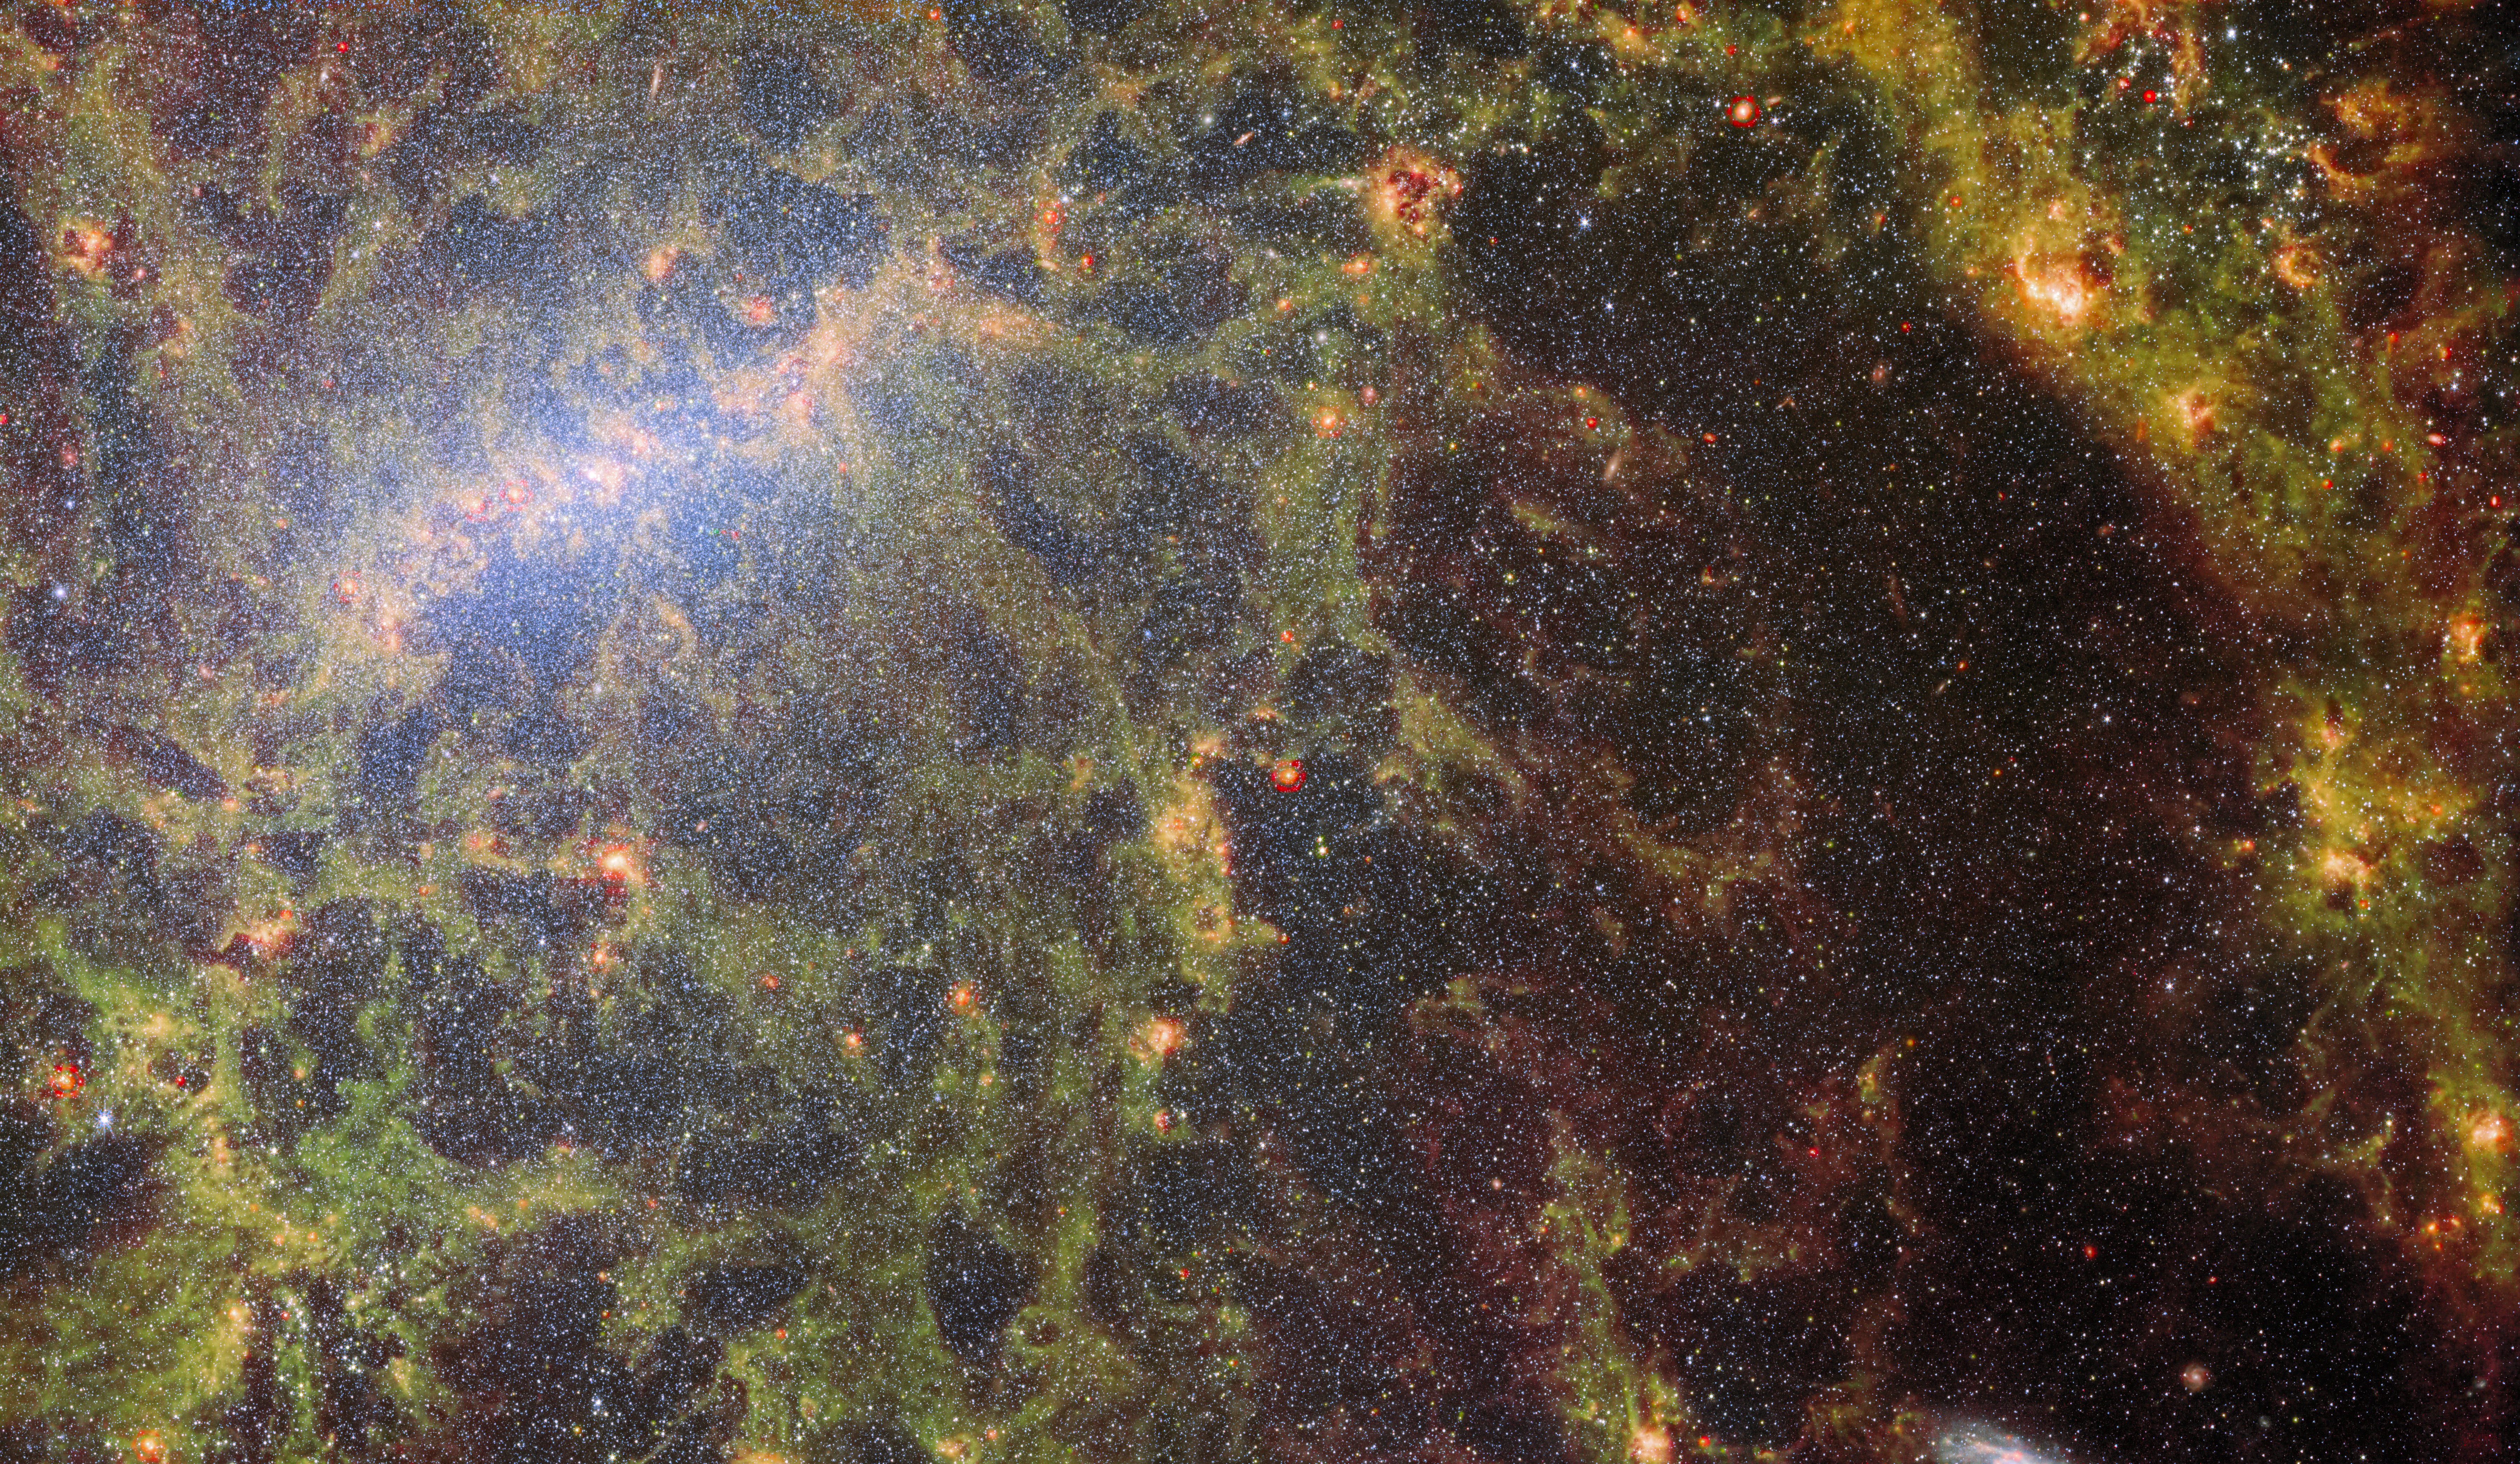

Webb peers behind bars

A delicate tracery of dust and bright star clusters threads across this image from the NASA/ESA/CSA James Webb Space Telescope. The bright tendrils of gas and stars belong to the barred spiral galaxy NGC 5068, whose bright central bar is visible in the upper left of this image. NGC 5068 lies around 17 million light-years from Earth in the constellation Virgo.

This portrait of NGC 5068 is part of a campaign to create an astronomical treasure trove, a repository of observations of star formation in nearby galaxies. Previous gems from this collection can be seen here and here. These observations are particularly valuable to astronomers for two reasons. The first is because star formation underpins so many fields in astronomy, from the physics of the tenuous plasma that lies between stars to the evolution of entire galaxies. By observing the formation of stars in nearby galaxies, astronomers hope to kick-start major scientific advances with some of the first available data from Webb.

The second reason is that Webb’s observations build on other studies using telescopes including the NASA/ESA Hubble Space Telescope and some of the world’s most capable ground-based observatories. Webb collected images of 19 nearby star-forming galaxies which astronomers could then combine with catalogues from Hubble of 10 000 star clusters, spectroscopic mapping of 20 000 star-forming emission nebulae from the Very Large Telescope (VLT), and observations of 12 000 dark, dense molecular clouds identified by the Atacama Large Millimeter/submillimeter Array (ALMA). These observations span the electromagnetic spectrum and give astronomers an unprecedented opportunity to piece together the minutiae of star formation.

With its ability to peer through the gas and dust enshrouding newborn stars, Webb is the perfect telescope to explore the processes governing star formation. Stars and planetary systems are born amongst swirling clouds of gas and dust that are opaque to observations in visible light, like many from Hubble or the VLT. The keen vision at infrared wavelengths of two of Webb’s instruments — MIRI and NIRCam — allowed astronomers to see right through the gargantuan clouds of dust in NGC 5068 and capture the processes of star formation as they happened. This image combines the capabilities of these two instruments, providing a truly unique look at the composition of NGC 5068.

Credit: ESA/Webb, NASA & CSA, J. Lee and the PHANGS-JWST Team